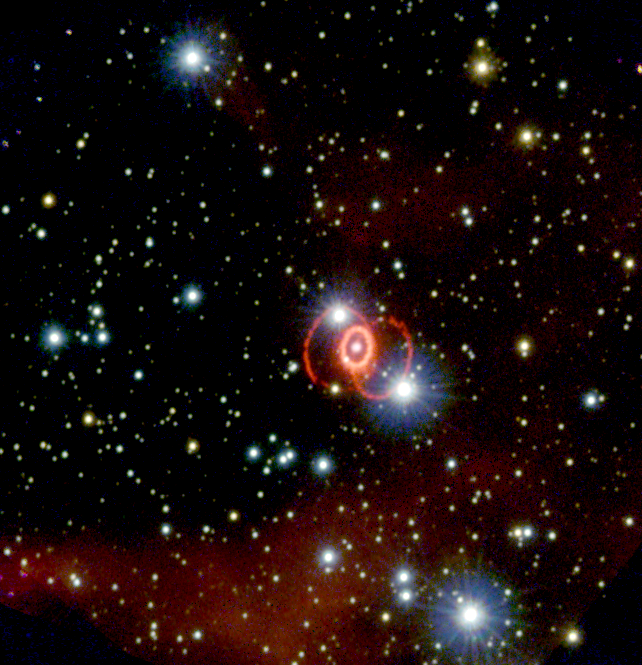

A three-ringed circus

This Hubble Space Telescope image, taken in February 1994 with the Wide Field and Planetary Camera 2, shows the full system of three rings of glowing gas surrounding supernova 1987A. Located in a small galaxy called the Large Magellanic Cloud, the supernova is a massive star that exploded in about 165, 000 BC, but its light didn't arrive here until February 1987.

Credit: P. Challis (CfA)